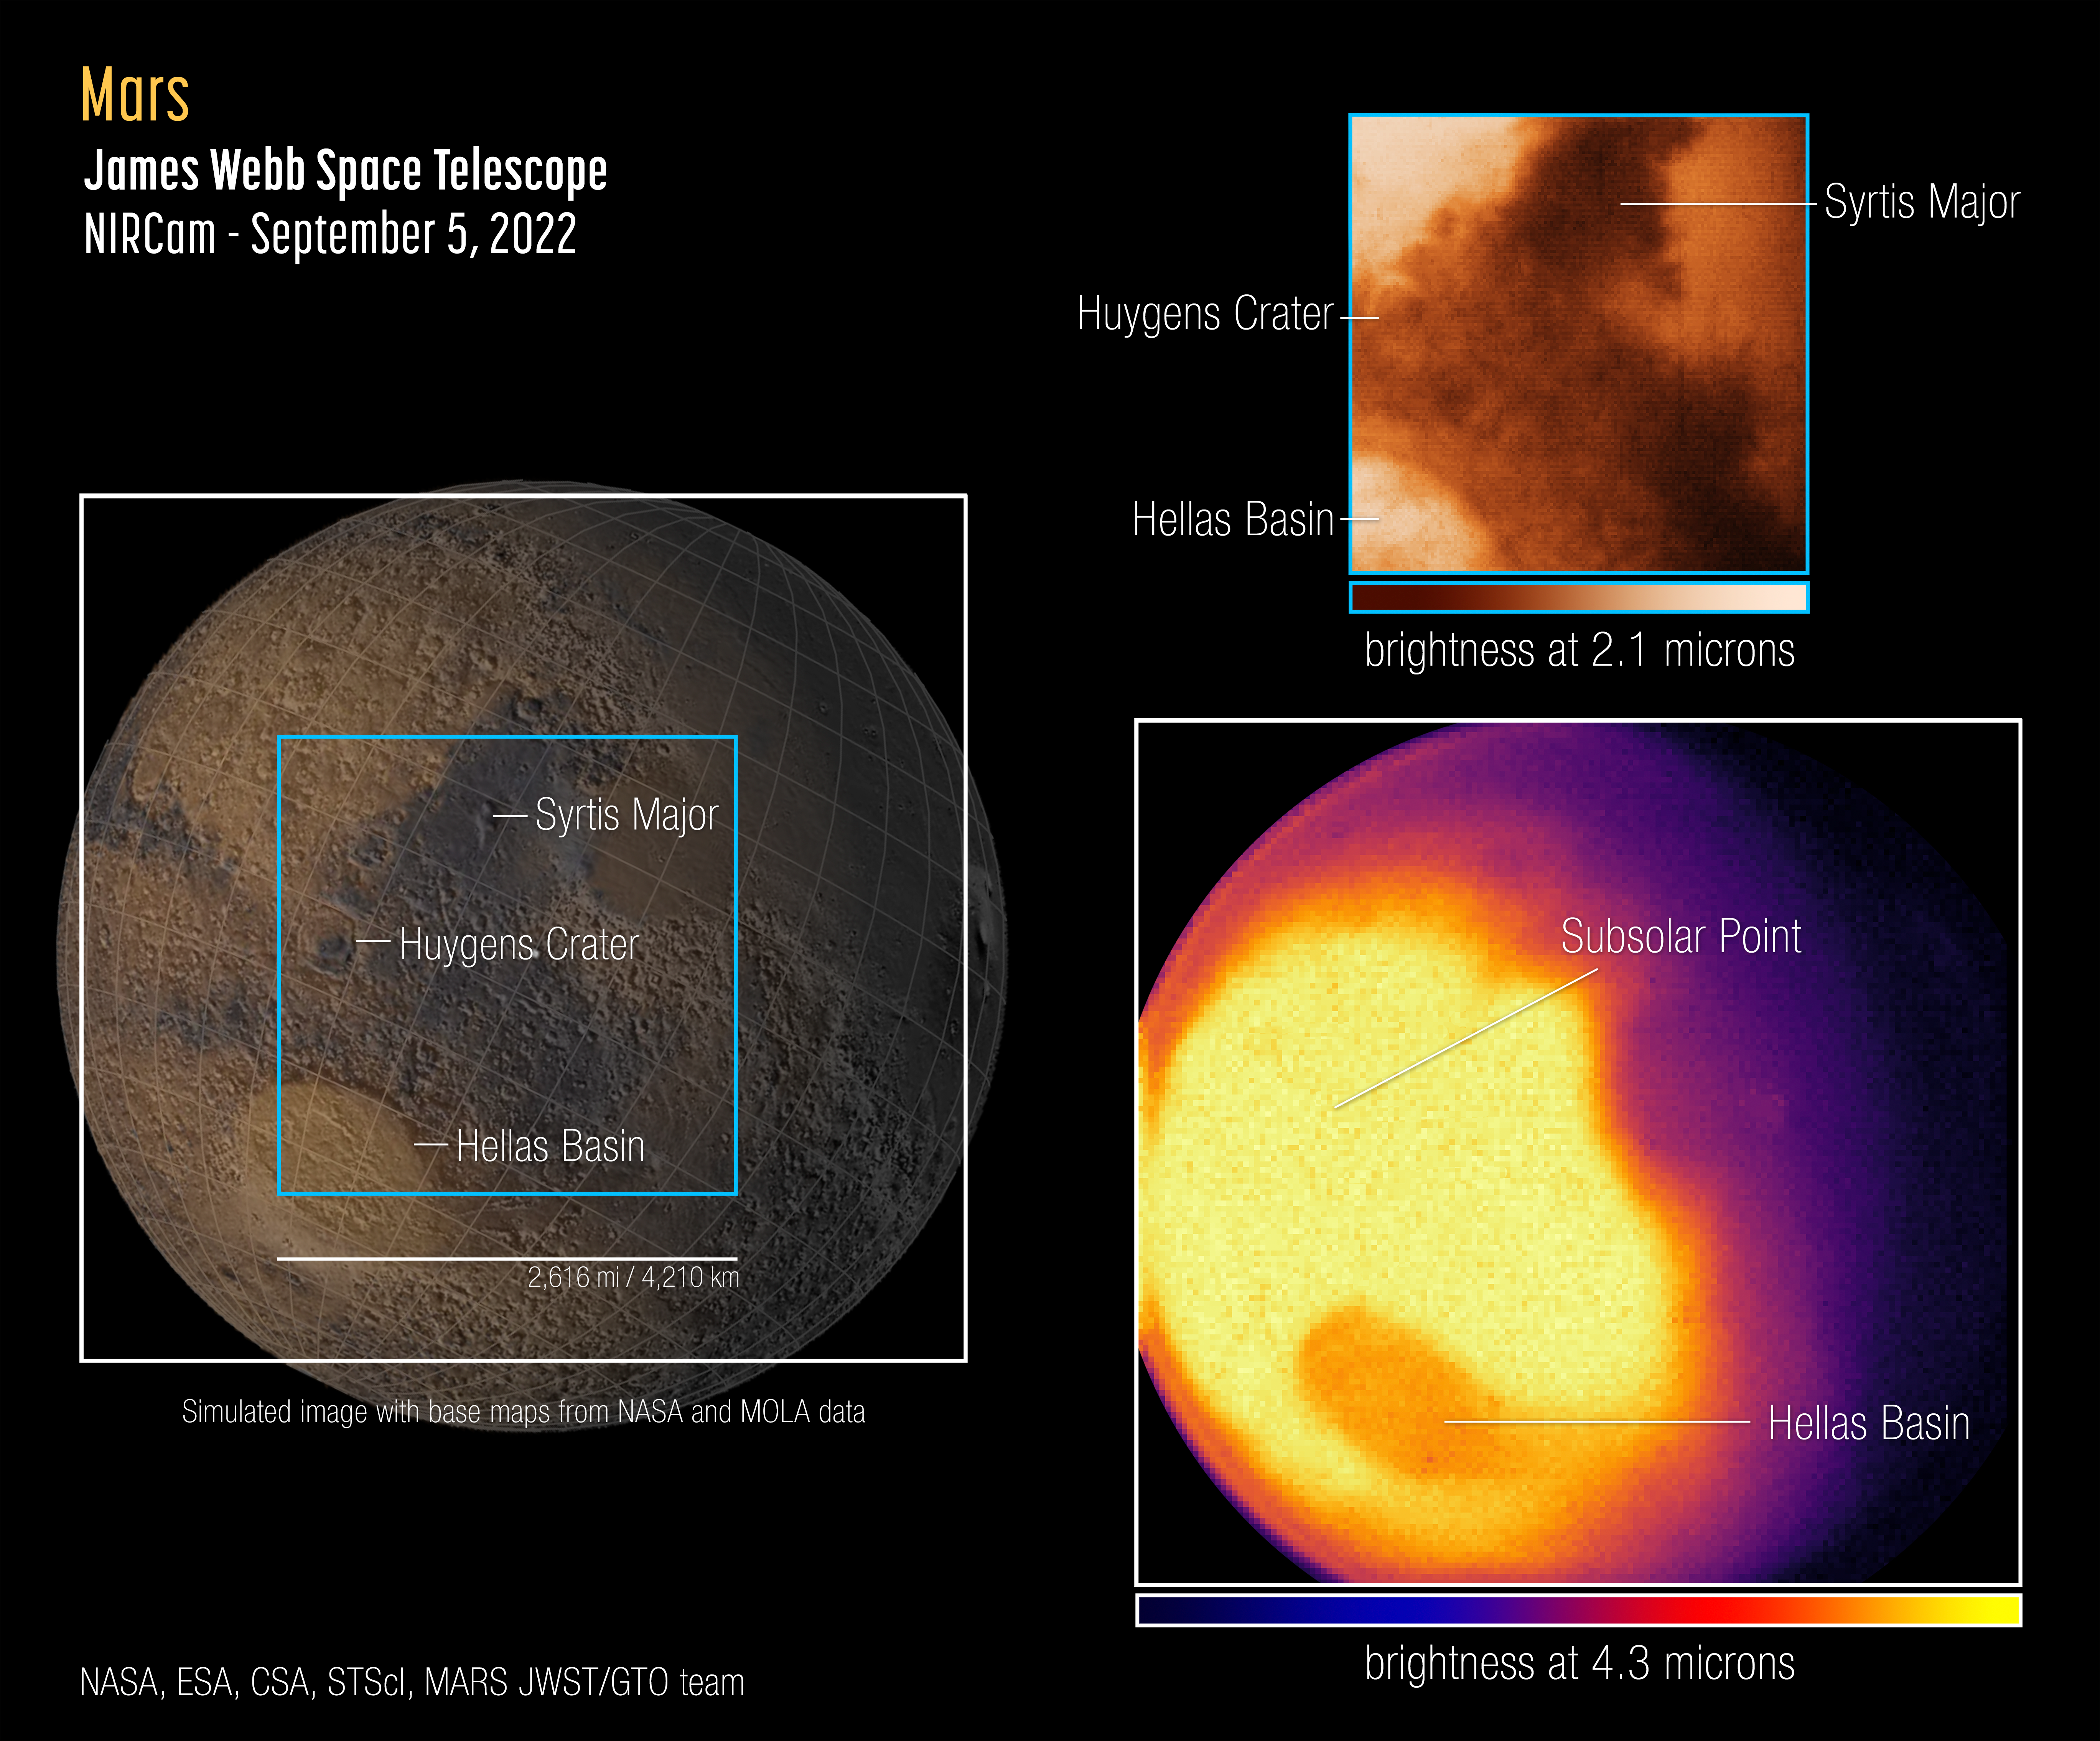

Mars Is Mighty in First Webb Observations of Red Planet

The James Webb Space Telescope captured its first images and spectra of Mars on 5 September 2022. The telescope, an international collaboration between NASA, ESA and the Canadian Space Agency, provides a unique perspective with its infrared sensitivity on our neighbouring planet, complementing data being collected by orbiters, rovers, and other telescopes.

Webb’s unique observation post nearly 1.5 million kilometres away at the Sun-Earth Lagrange point 2 (L2) provides a view of Mars’ observable disk (the portion of the sunlit side that is facing the telescope). As a result, Webb can capture images and spectra with the spectral resolution needed to study short-term phenomena like dust storms, weather patterns, seasonal changes, and, in a single observation, processes that occur at different times (daytime, sunset, and nighttime) of a Martian day.

Because it is so close, the Red Planet is one of the brightest objects in the night sky in terms of both visible light (which human eyes can see) and the infrared light that Webb is designed to detect. This poses special challenges to the observatory, which was built to detect the extremely faint light of the most distant galaxies in the universe. Webb’s instruments are so sensitive that without special observing techniques, the bright infrared light from Mars is blinding, causing a phenomenon known as “detector saturation.” Astronomers adjusted for Mars’ extreme brightness by using very short exposures, measuring only some of the light that hit the detectors, and applying special data analysis techniques.

Webb’s first images of Mars, captured by the Near-Infrared Camera (NIRCam), show a region of the planet’s eastern hemisphere at two different wavelengths, or colours of infrared light. This image shows a surface reference map from NASA and the Mars Orbiter Laser Altimeter (MOLA) on the left, with the two Webb NIRCam instrument field of views overlaid. The near-infrared images from Webb are shown on the right.

The NIRCam shorter-wavelength (2.1 microns) image [top right] is dominated by reflected sunlight, and thus reveals surface details similar to those apparent in visible-light images [left]. The rings of the Huygens Crater, the dark volcanic rock of Syrtis Major, and brightening in the Hellas Basin are all apparent in this image.

The NIRCam longer-wavelength (4.3 microns) image [lower right] shows thermal emission – light given off by the planet as it loses heat. The brightness of 4.3-micron light is related to the temperature of the surface and the atmosphere. The brightest region on the planet is where the Sun is nearly overhead, because it is generally warmest. The brightness decreases toward the polar regions, which receive less sunlight, and less light is emitted from the cooler northern hemisphere, which is experiencing winter at this time of year.

However, temperature is not the only factor affecting the amount of 4.3-micron light reaching Webb with this filter. As light emitted by the planet passes through Mars’ atmosphere, some gets absorbed by carbon dioxide (CO2) molecules. The Hellas Basin – which is the largest well-preserved impact structure on Mars, spanning more than 2,000 kilometres – appears darker than the surroundings because of this effect.

In the future, Webb will be using this imaging and spectroscopic data to explore regional differences across the planet, and to search for trace species in the atmosphere, including methane and hydrogen chloride.

These observations of Mars were conducted as part of Webb’s Cycle 1 Guaranteed Time Observation (GTO) Solar System program led by Heidi Hammel of AURA.

ESA operates two Mars orbiters, Mars Express and the ExoMars Trace Gas Orbiter, that have brought a treasury of insight into the Red Planet’s atmosphere and surface. Furthermore, ESA collaborates with the Japanese Aerospace Exploration Agency (JAXA) on the Martian Moons eXploration (MMX) mission, soon to launch for Mars’ moon Phobos.

Note: This post highlights images from Webb science in progress, which has not yet been through the peer-review process.

Credit: NASA, ESA, CSA, STScI, Mars JWST/GTO team